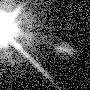

Galaxies: Snapshots in time

Single images from the Galaxies: Snapshots in Time collage.

Credit: NASA & ESA